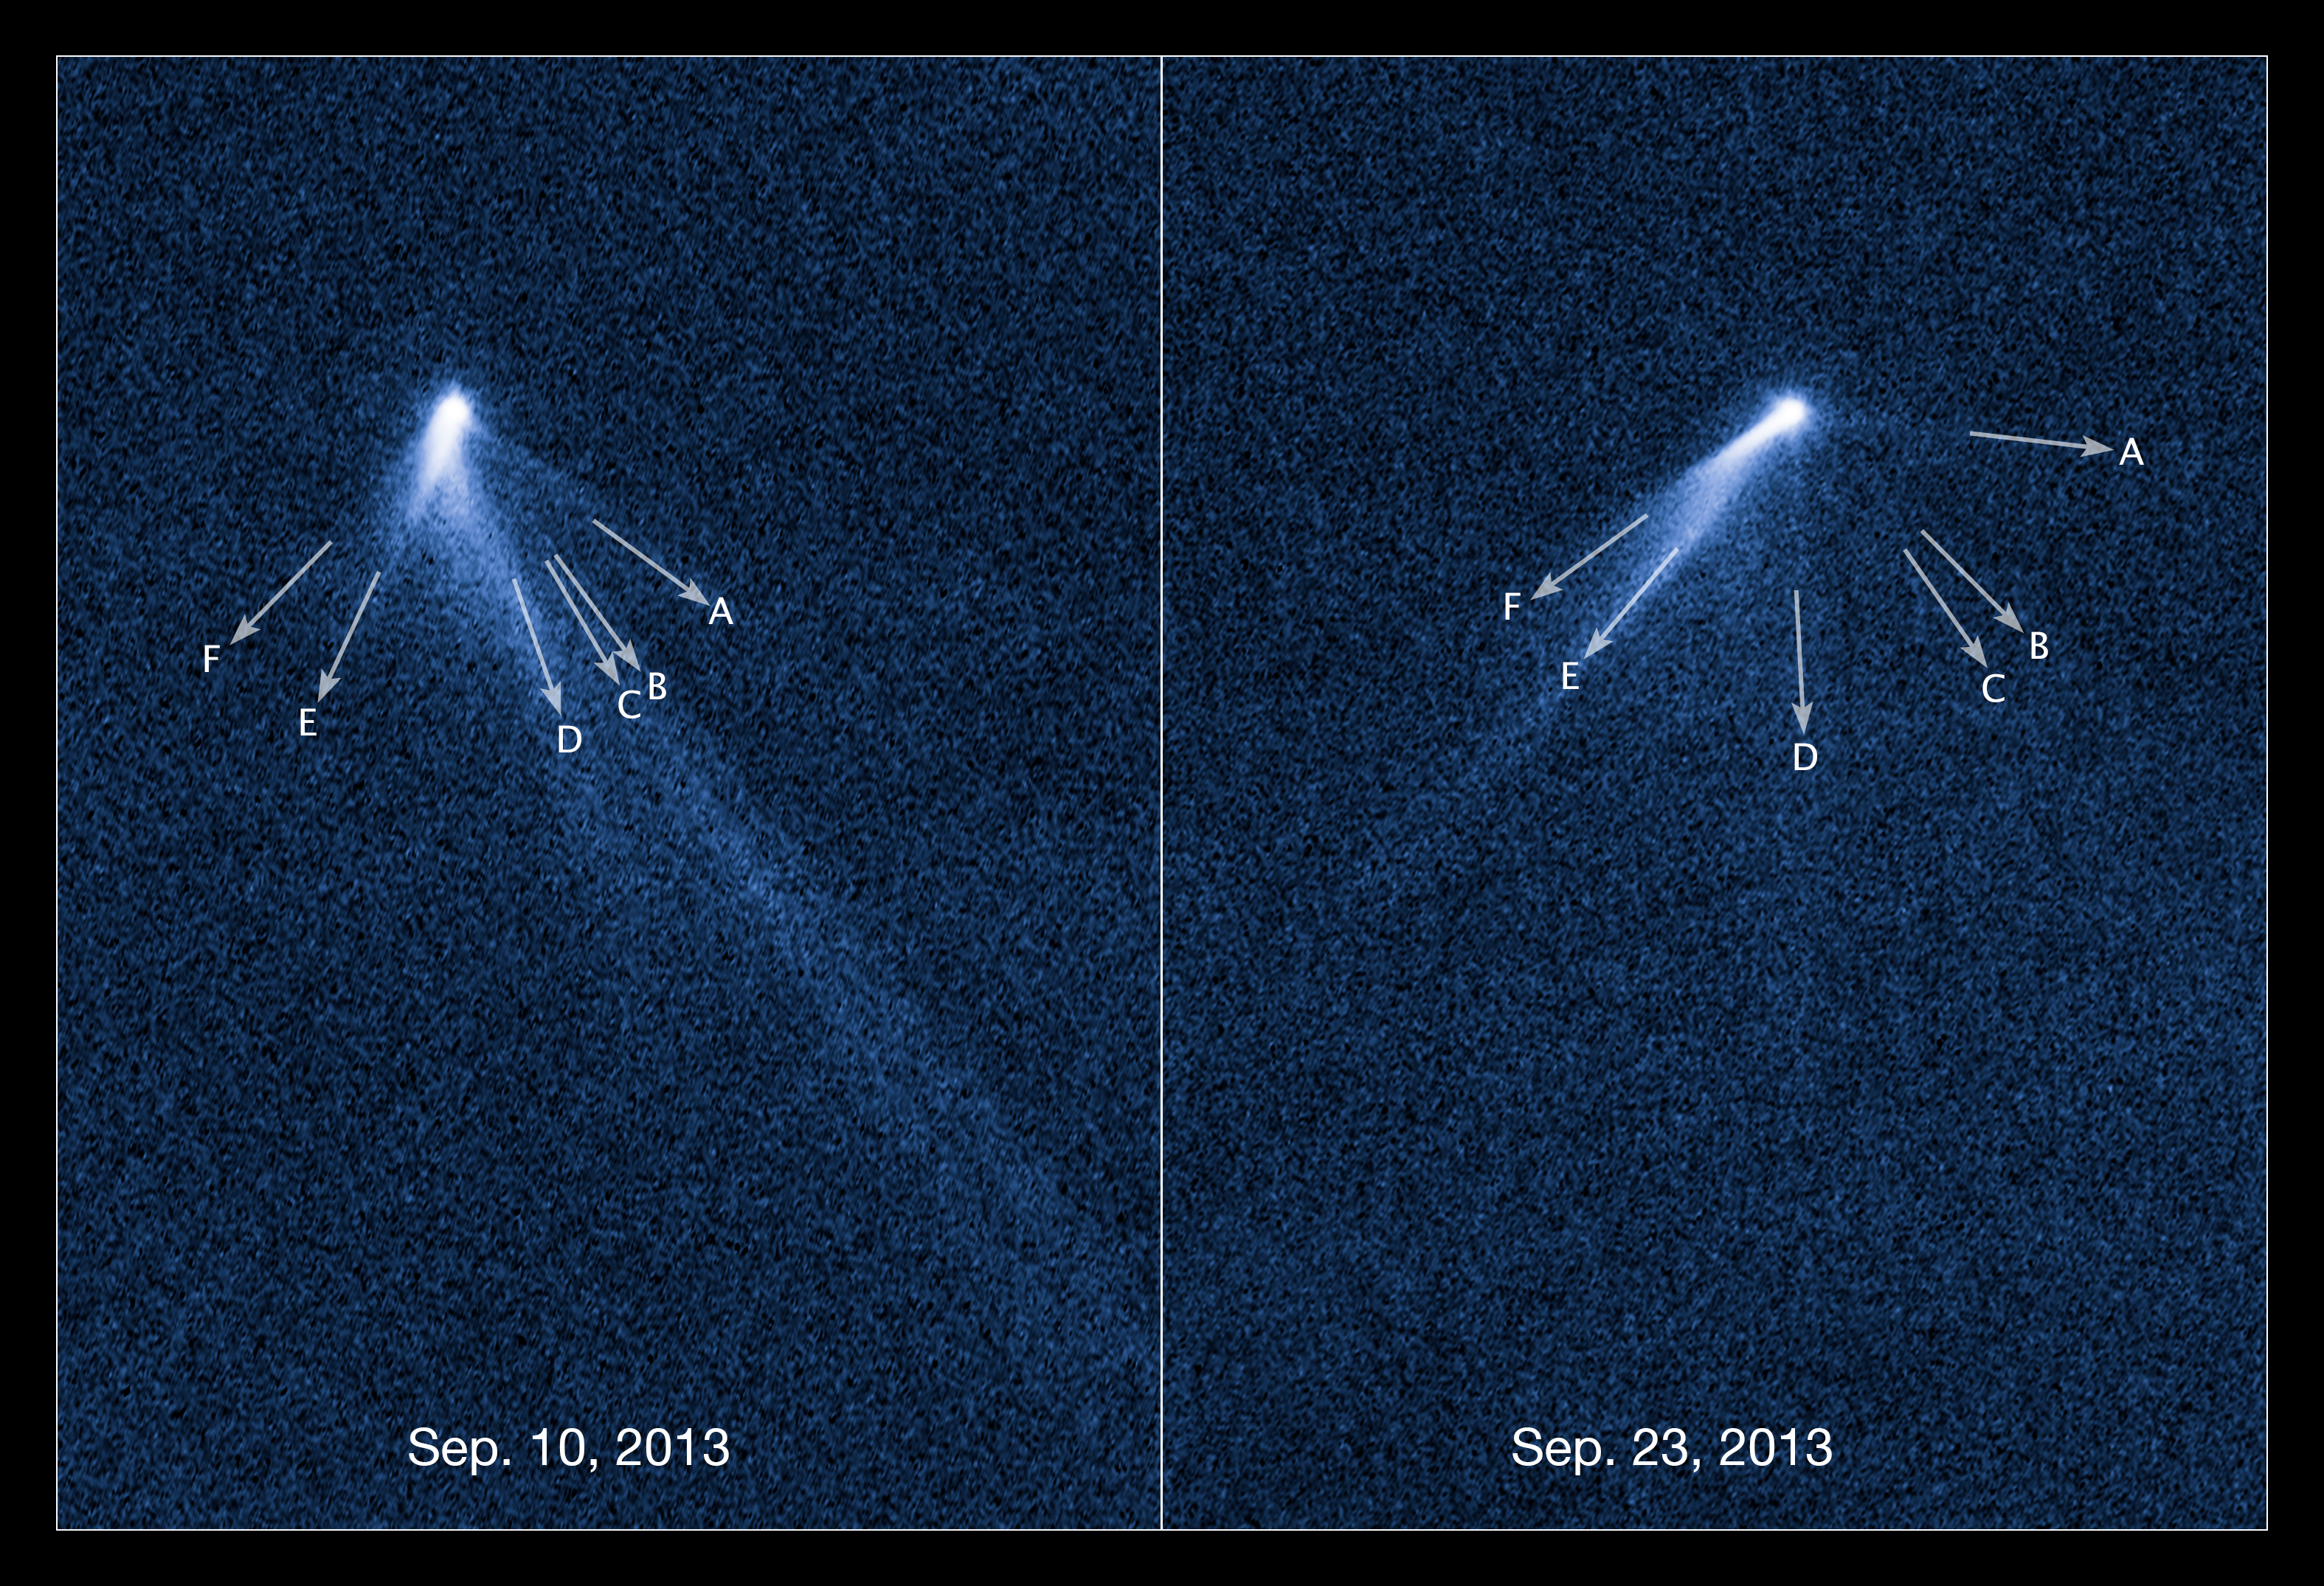

Labelled view of extraordinary multi-tailed asteroid P/2013 P5

These NASA/ESA Hubble Space Telescope images reveal a never-before seen set of six comet-like tails radiating from a body in the asteroid belt designated P/2013 P5. P/2013 P5 is seen on the left as viewed on 10 September 2013, and on the right as seen on 23 September 2013.

The asteroid was discovered as an unusually fuzzy looking object by astronomers using the Pan-STARRS survey telescope in Hawaii. The multiple tails were discovered in Hubble images taken on September 10 2013. When Hubble returned to the asteroid on 23 September its appearance had totally changed – it looked as if the entire structure had swung around. The location of each of the tails is indicated by an arrow, showing clearly how they change over time. The Sun is located to the top right of each frame.

One interpretation is that the asteroid's rotation rate has increased to the point where dust is falling off the surface and escaping into space, where the pressure of sunlight sweeps it out into tails. According to this theory, the asteroid's spin has been accelerated by the gentle push of sunlight. Based on analysis of the tail structure, the object has ejected dust for at least five months.

These visible light images were taken with Hubble's Wide Field Camera 3.

Credit: NASA, ESA, D. Jewitt (University of California, Los Angeles), J. Agarwal (Max Planck Institute for Solar System Research), H. Weaver (Johns Hopkins University Applied Physics Laboratory), M. Mutchler (STScI), and S. Larson (University of Arizona)